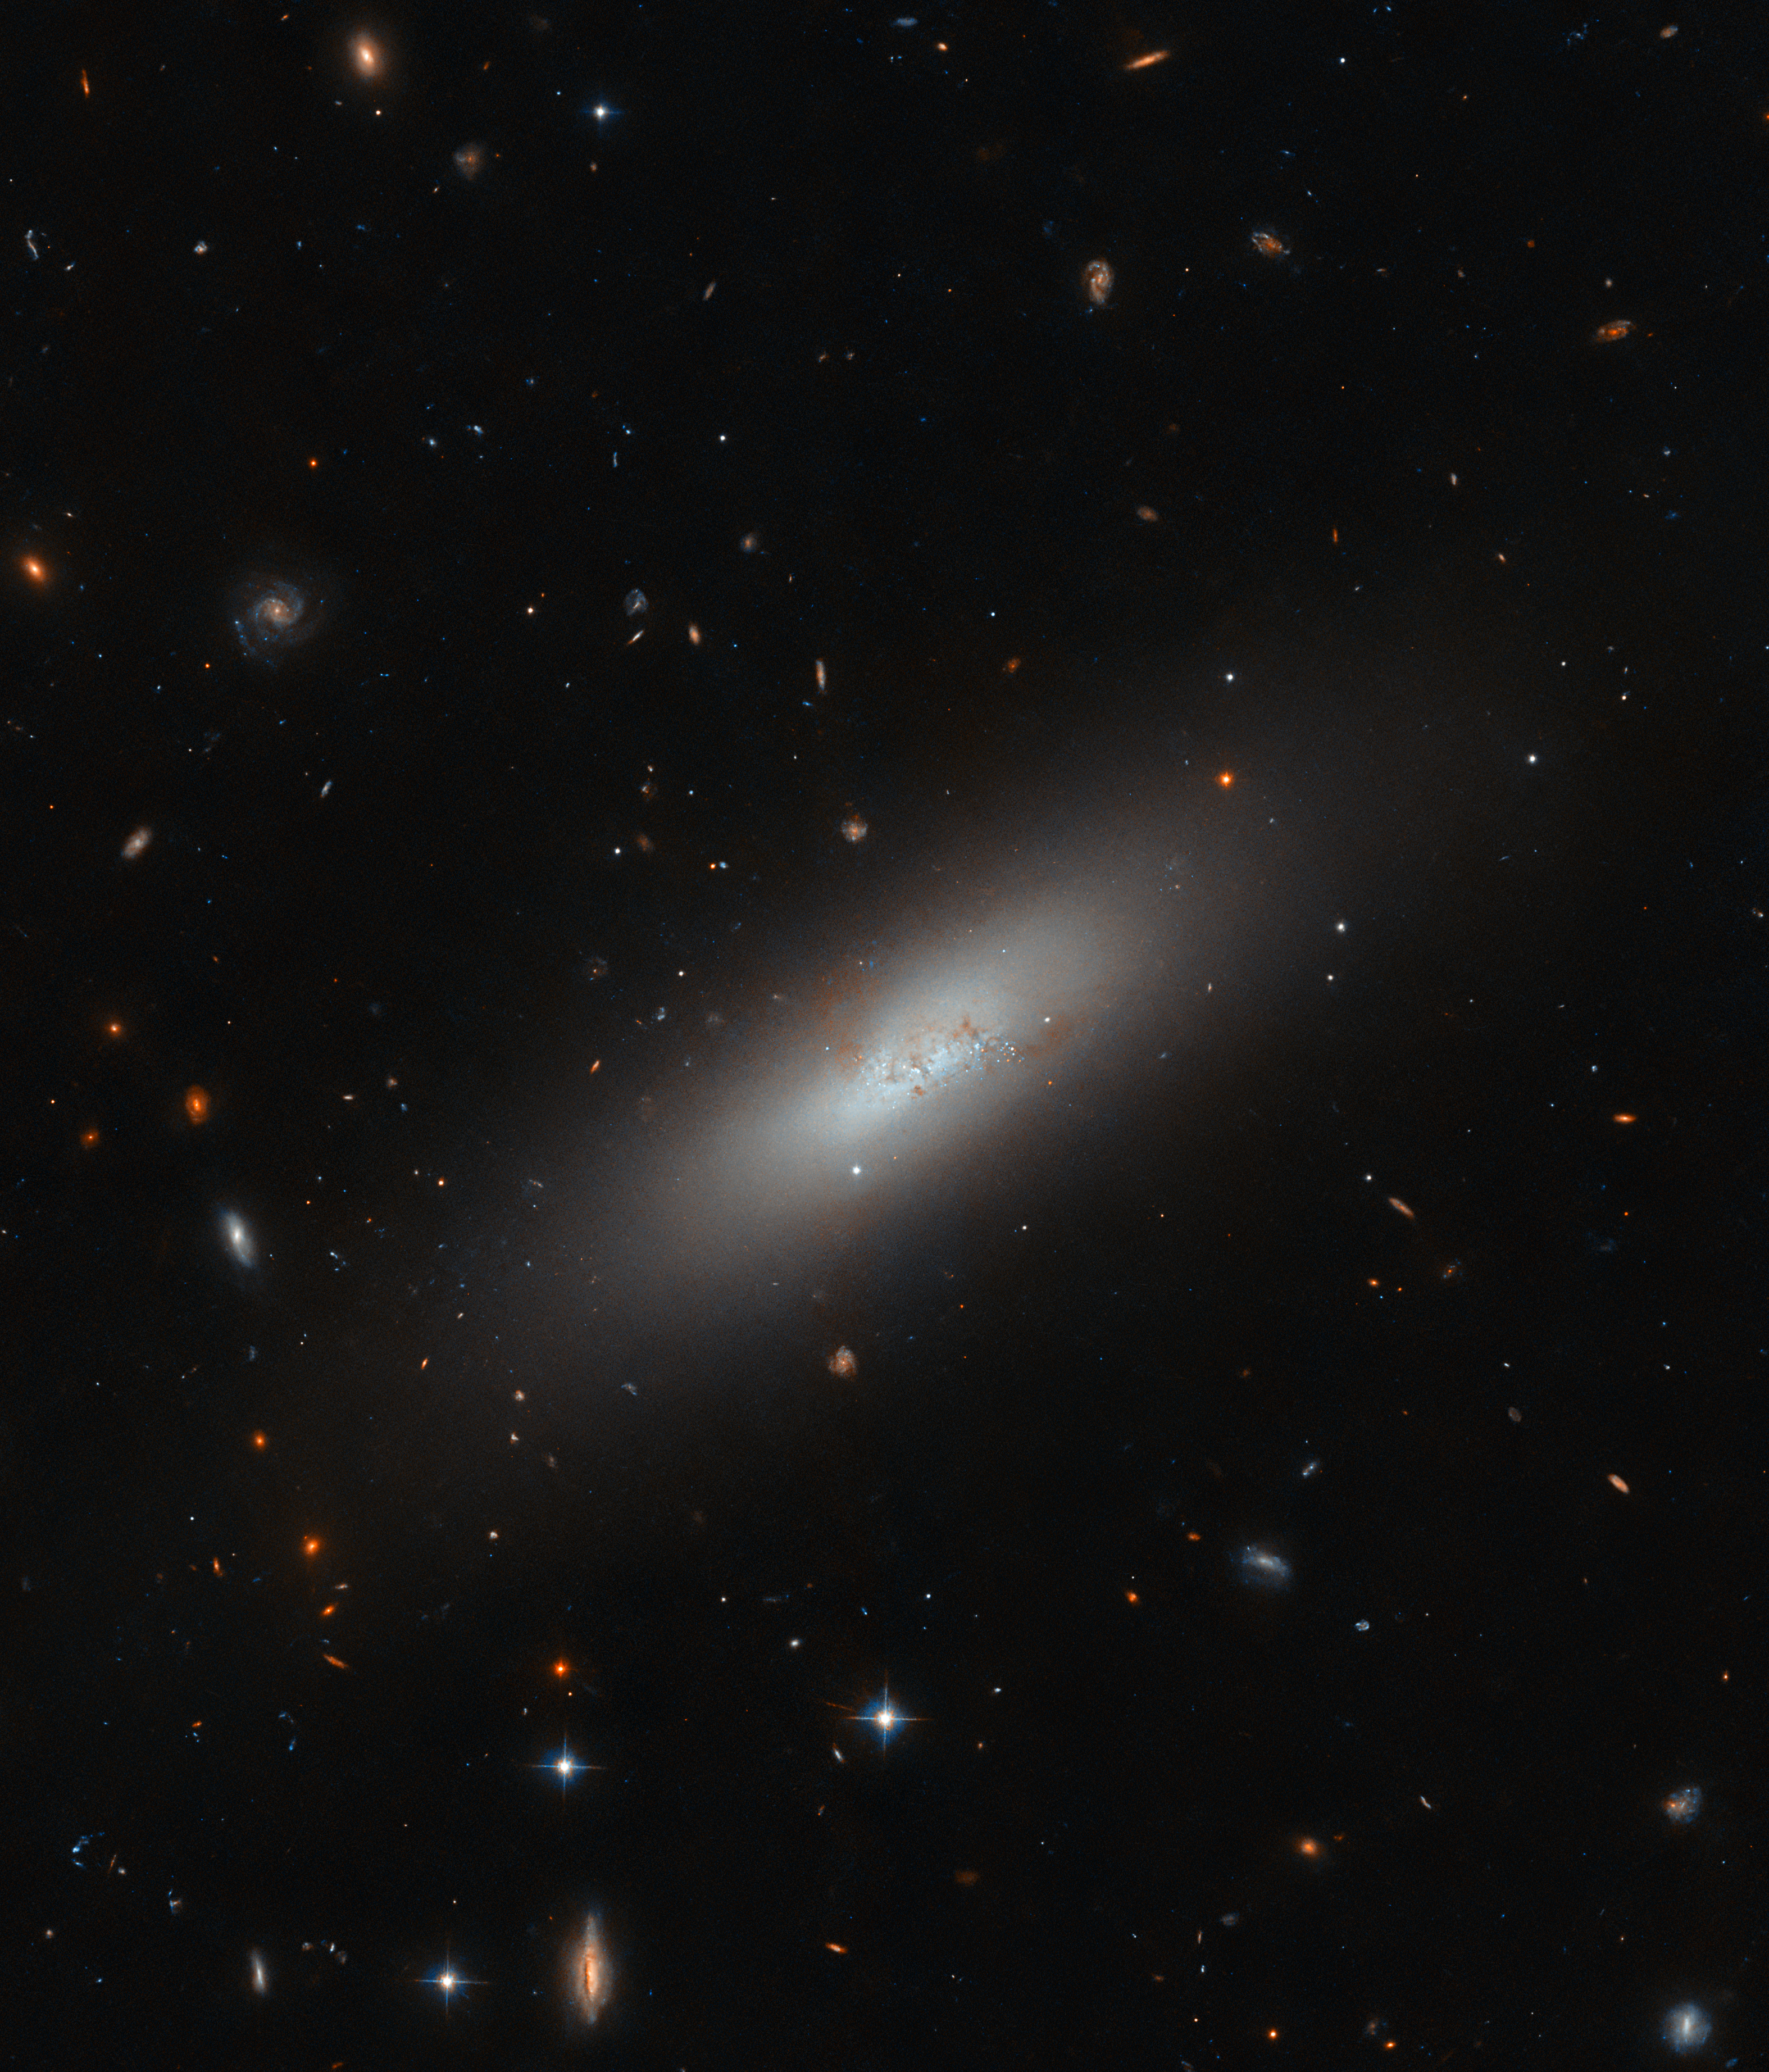

Galaxies in miniature

The Hubble Picture of the Week this week reveals the subtle glow of the galaxy named IC 3430, located 45 million light-years from Earth in the constellation Virgo. It is part of the Virgo cluster, a rich collection of galaxies both large and small, many of which are very similar in type to this diminutive galaxy.

IC 3430 is a dwarf galaxy, a fact well reflected by this view from Hubble, but it is more precisely known as a dwarf elliptical or dE galaxy. Like its larger cousins, this galaxy has a smooth, oval shape lacking any recognisable features like arms or bars, and it is bereft of gas to form very many new stars. Interestingly, IC 3430 does feature a core of hot, massive blue stars, an uncommon sight in elliptical galaxies that indicates recent star-forming activity. It’s believed that ram pressure from the galaxy ploughing through gas within the Virgo cluster has ignited what gas does remain in IC 3430’s core to form some new stars.

Dwarf galaxies are really just galaxies with not many stars, usually fewer than a billion, but that is often enough for them to reproduce in miniature the same forms as larger galaxies. There are dwarf elliptical galaxies like IC 3430, dwarf irregular galaxies, dwarf spheroidal galaxies and even dwarf spiral galaxies! The so-called Magellanic spiral is a distinct type of dwarf galaxy, too, the best example being the well-known dwarf galaxies that are the Magellanic Clouds.

Credit: ESA/Hubble & NASA, M. Sun